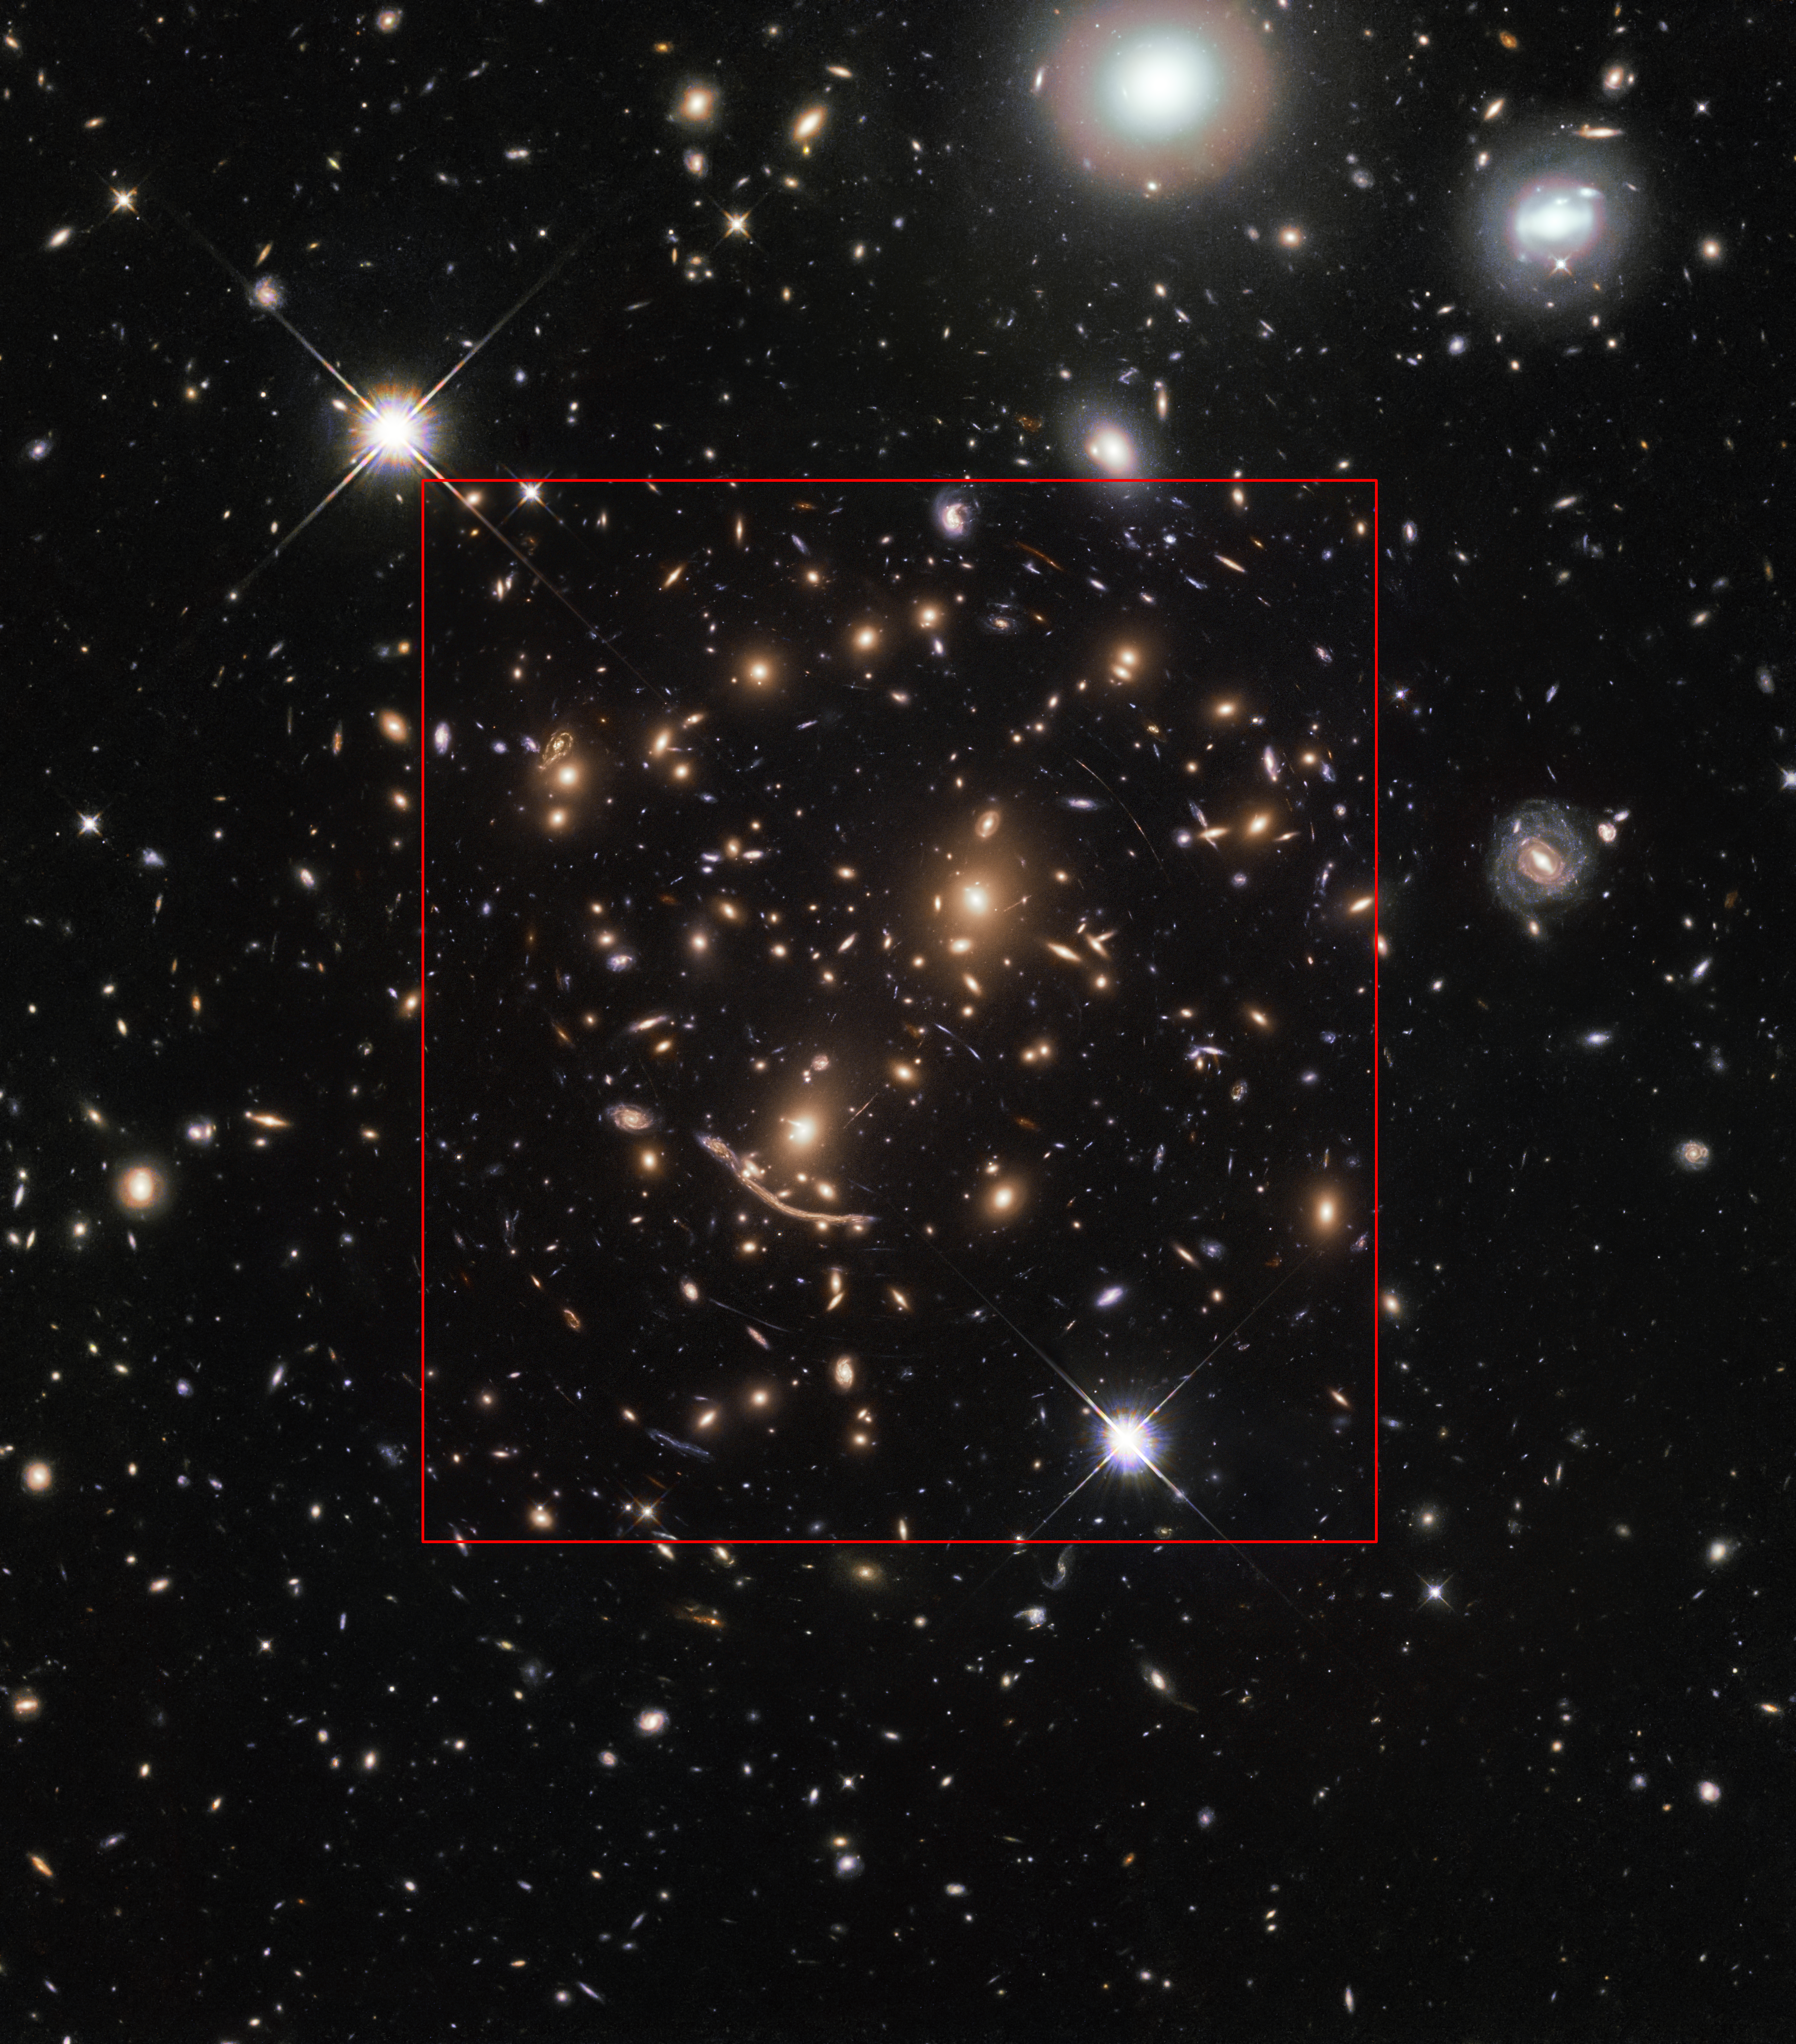

Comparison between Frontier Fields and BUFFALO

This image composite shows the new observations of Abell 370 made for the BUFFALO project, as well as the old observation made for the Frontier Fields programme. The composition clearly shows the extended field of view in the new observations.

Credit: NASA, ESA, A. Koekemoer, M. Jauzac, C. Steinhardt, the BUFFALO team and HST Frontier Fields.